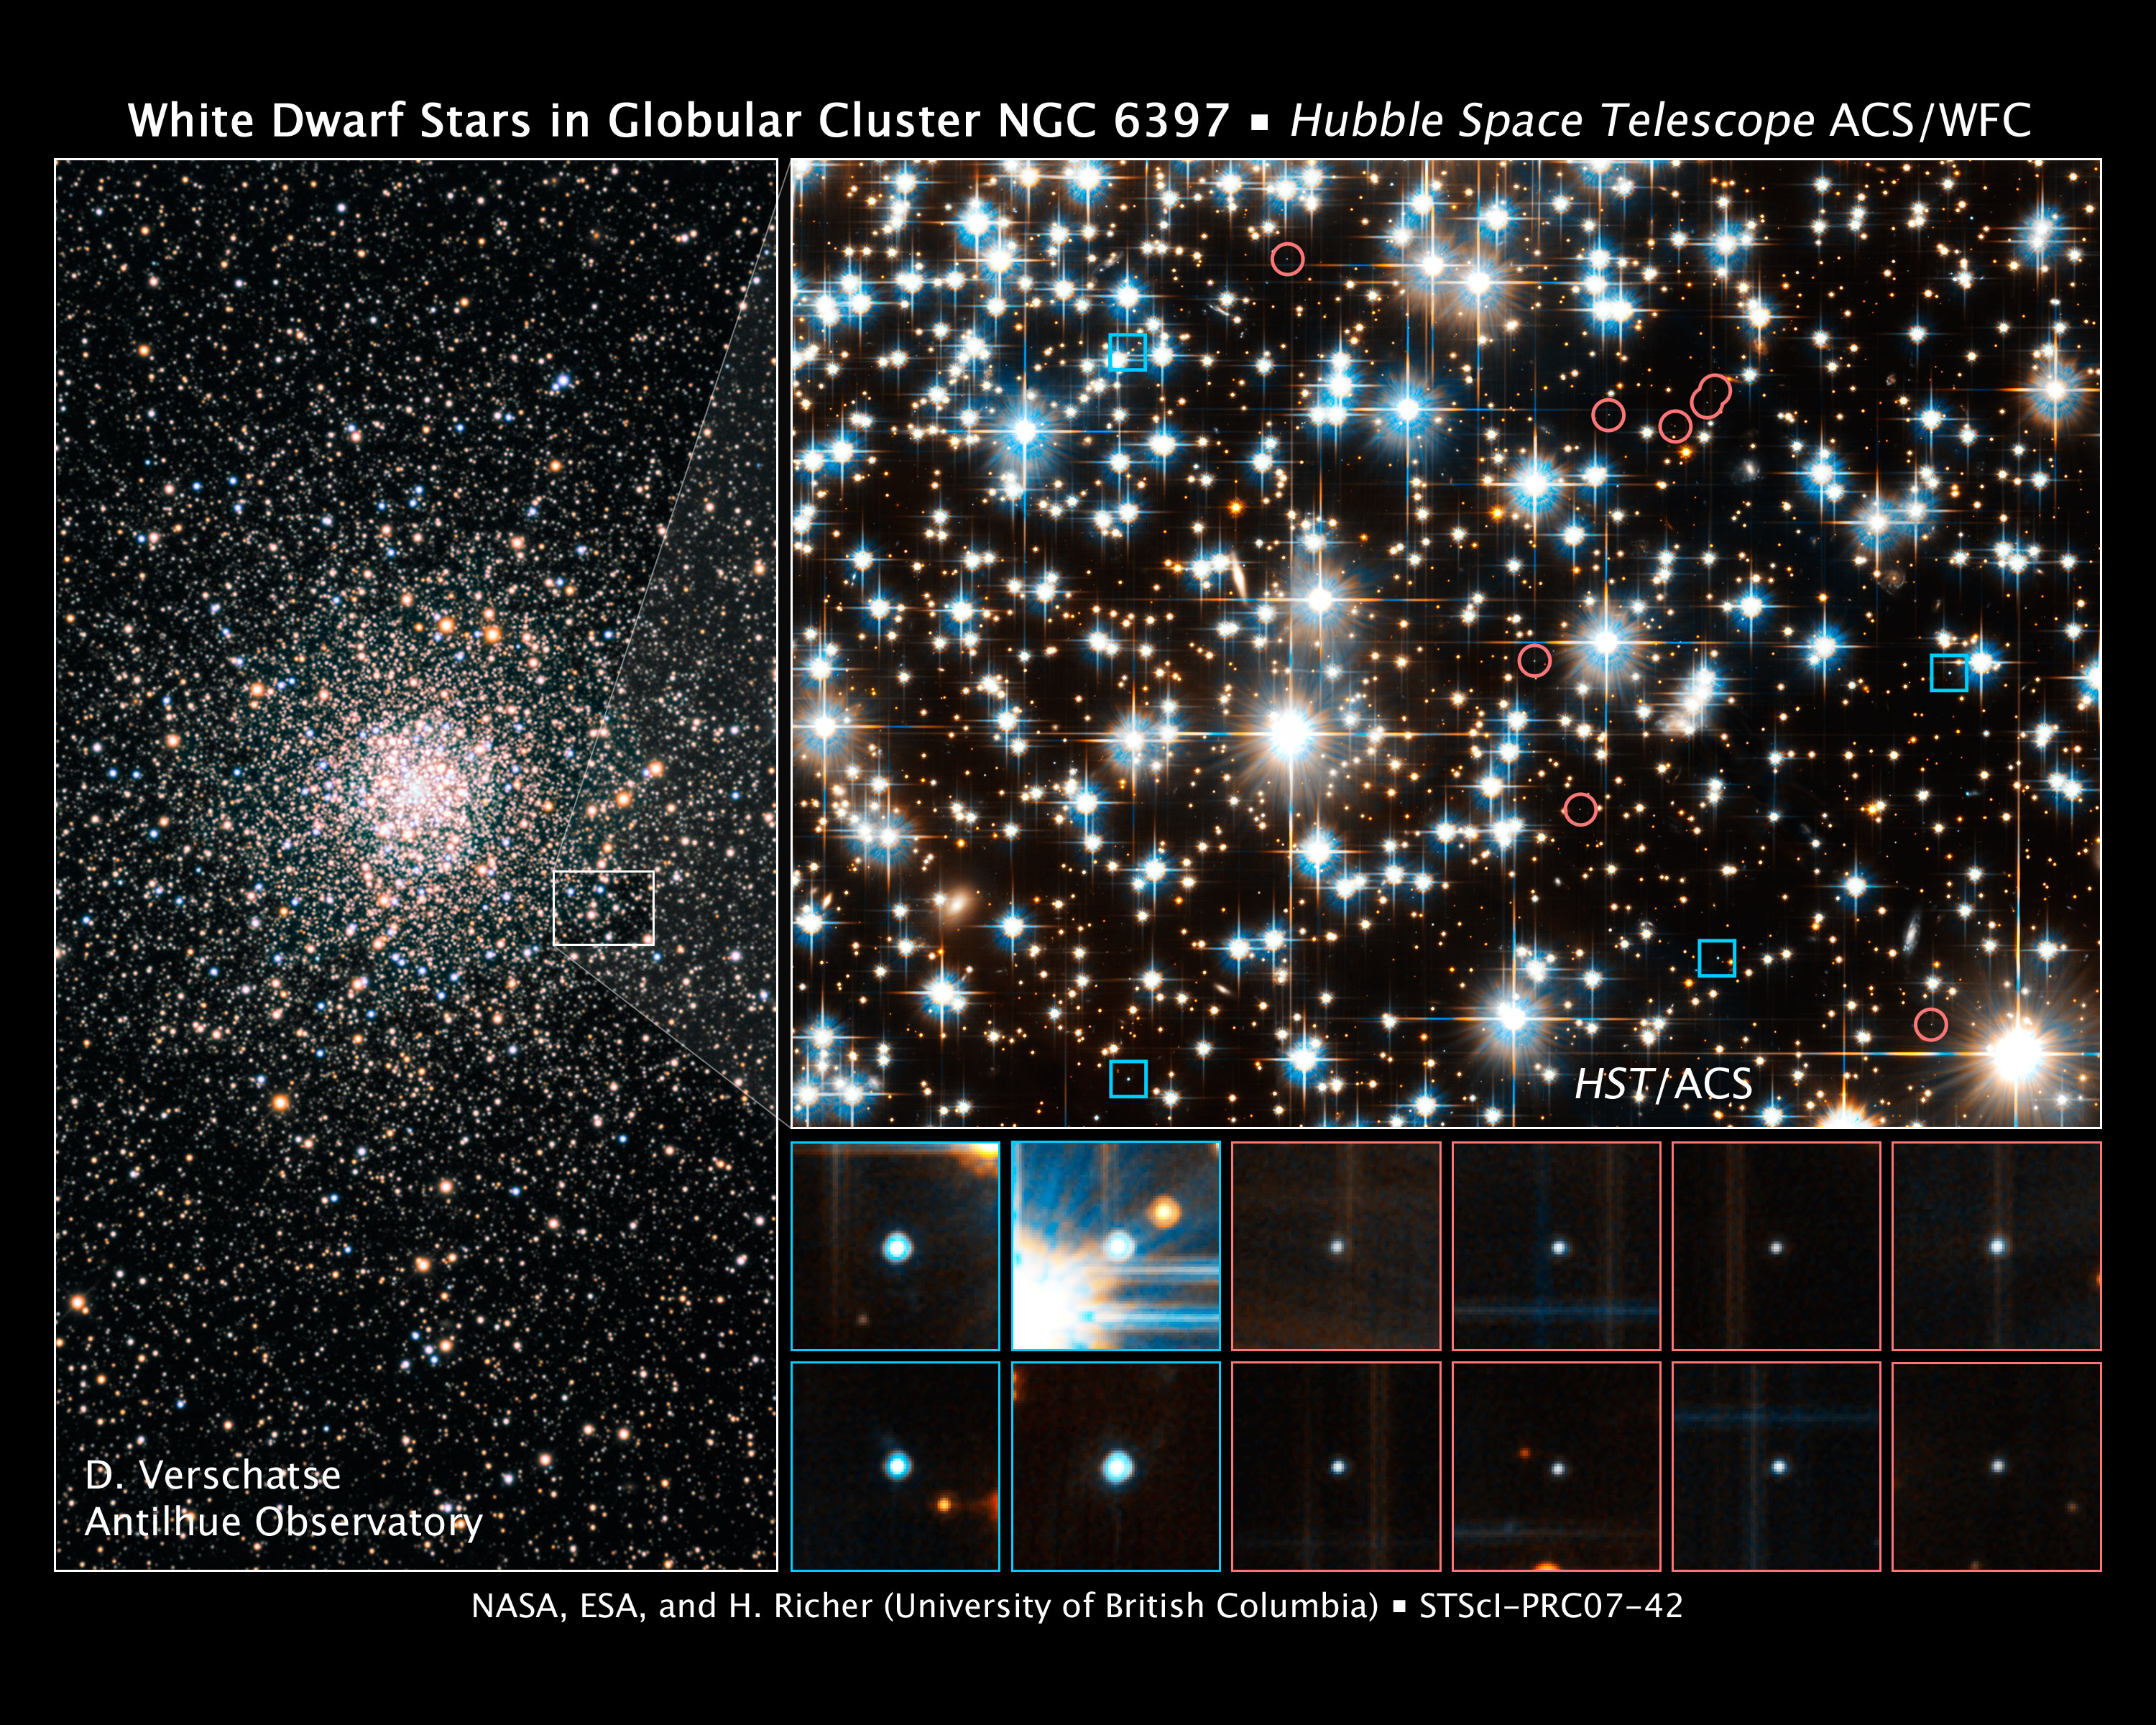

Hubble Finds Young White Dwarfs on the Fast Track

These images show young and old white dwarf stars - the burned-out relics of normal stars - in the ancient globular star cluster NGC 6397.

The image at left, taken by a ground-based telescope, shows the dense swarm of hundreds of thousands of stars that make up the globular cluster. The white box outlines the location of the observations made by the NASA/ESA Hubble Space Telescope.

The image at top, right, taken by Hubble's Advanced Camera for Surveys, reveals young white dwarfs less than 800 million years old and older white dwarfs between 1.4 and 3.5 billion years old. The photo shows 12 of the 84 white dwarfs in the Hubble study. The blue squares pinpoint the young white dwarfs; the red circles outline the older white dwarfs. The Hubble researchers distinguished the younger from the older white dwarfs based on their colour and brightness. The younger white dwarfs are hotter and therefore bluer and brighter than the older ones.

Credit for Ground-based Image: D. Verschatse (Antilhue Observatory, Chile) Credit for Hubble Images: NASA, ESA, and H. Richer (University of British Columbia)